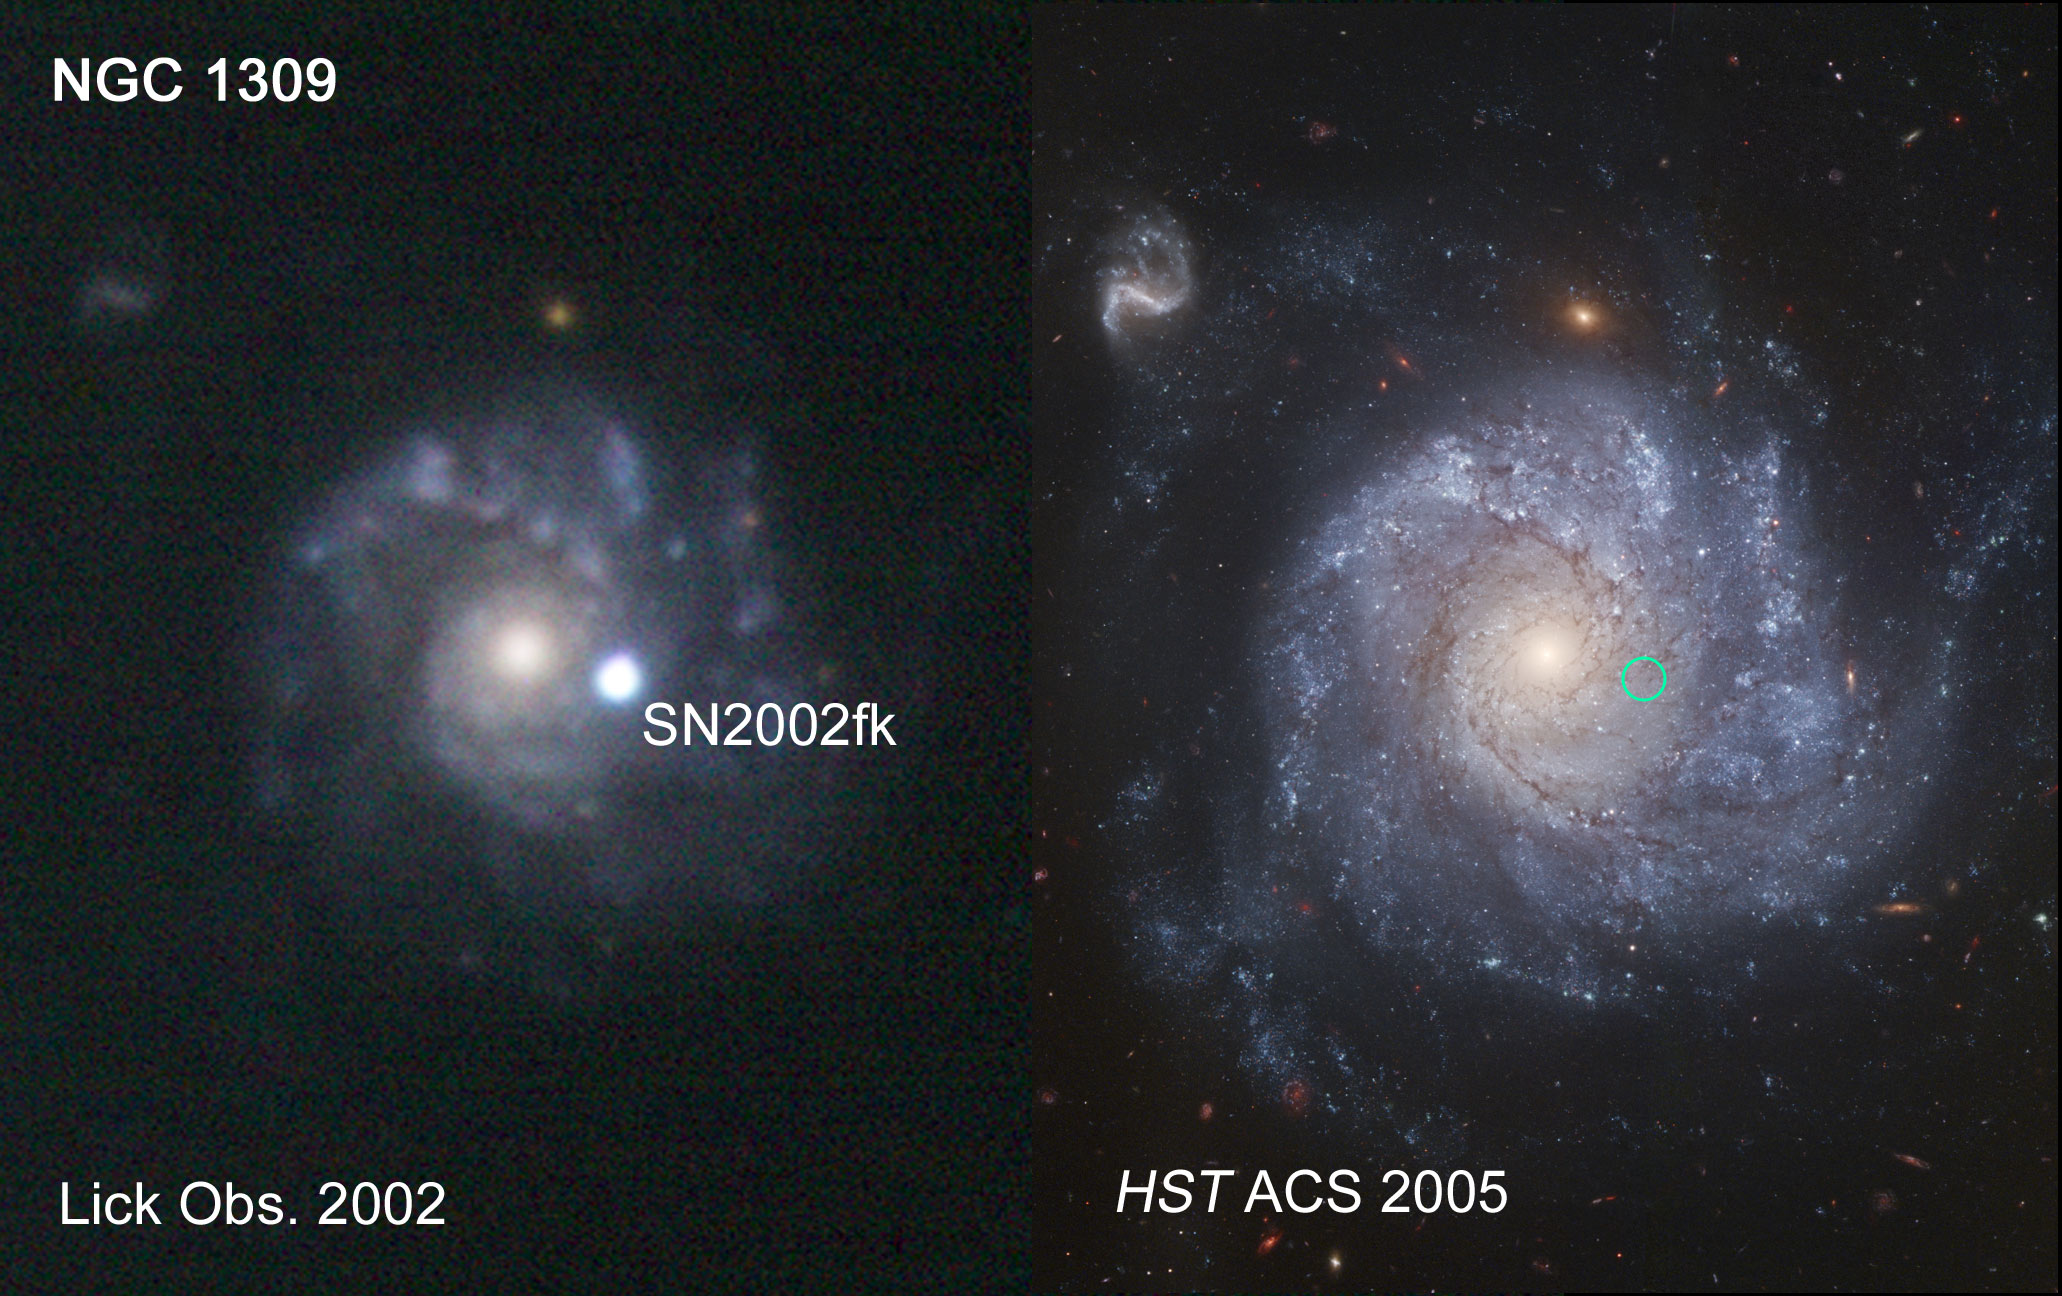

Lick observatory ground-based image of SN2002fk in NGC 1309

SN2002fk as observed from Lick Observatory Kait 0.76 meter telescope in 2002. The location of the supernova is marked on the 2005 Hubble ACS image.

Credit: NASA, ESA, The Hubble Heritage Team, (STScI/AURA) and A. Riess (STScI)